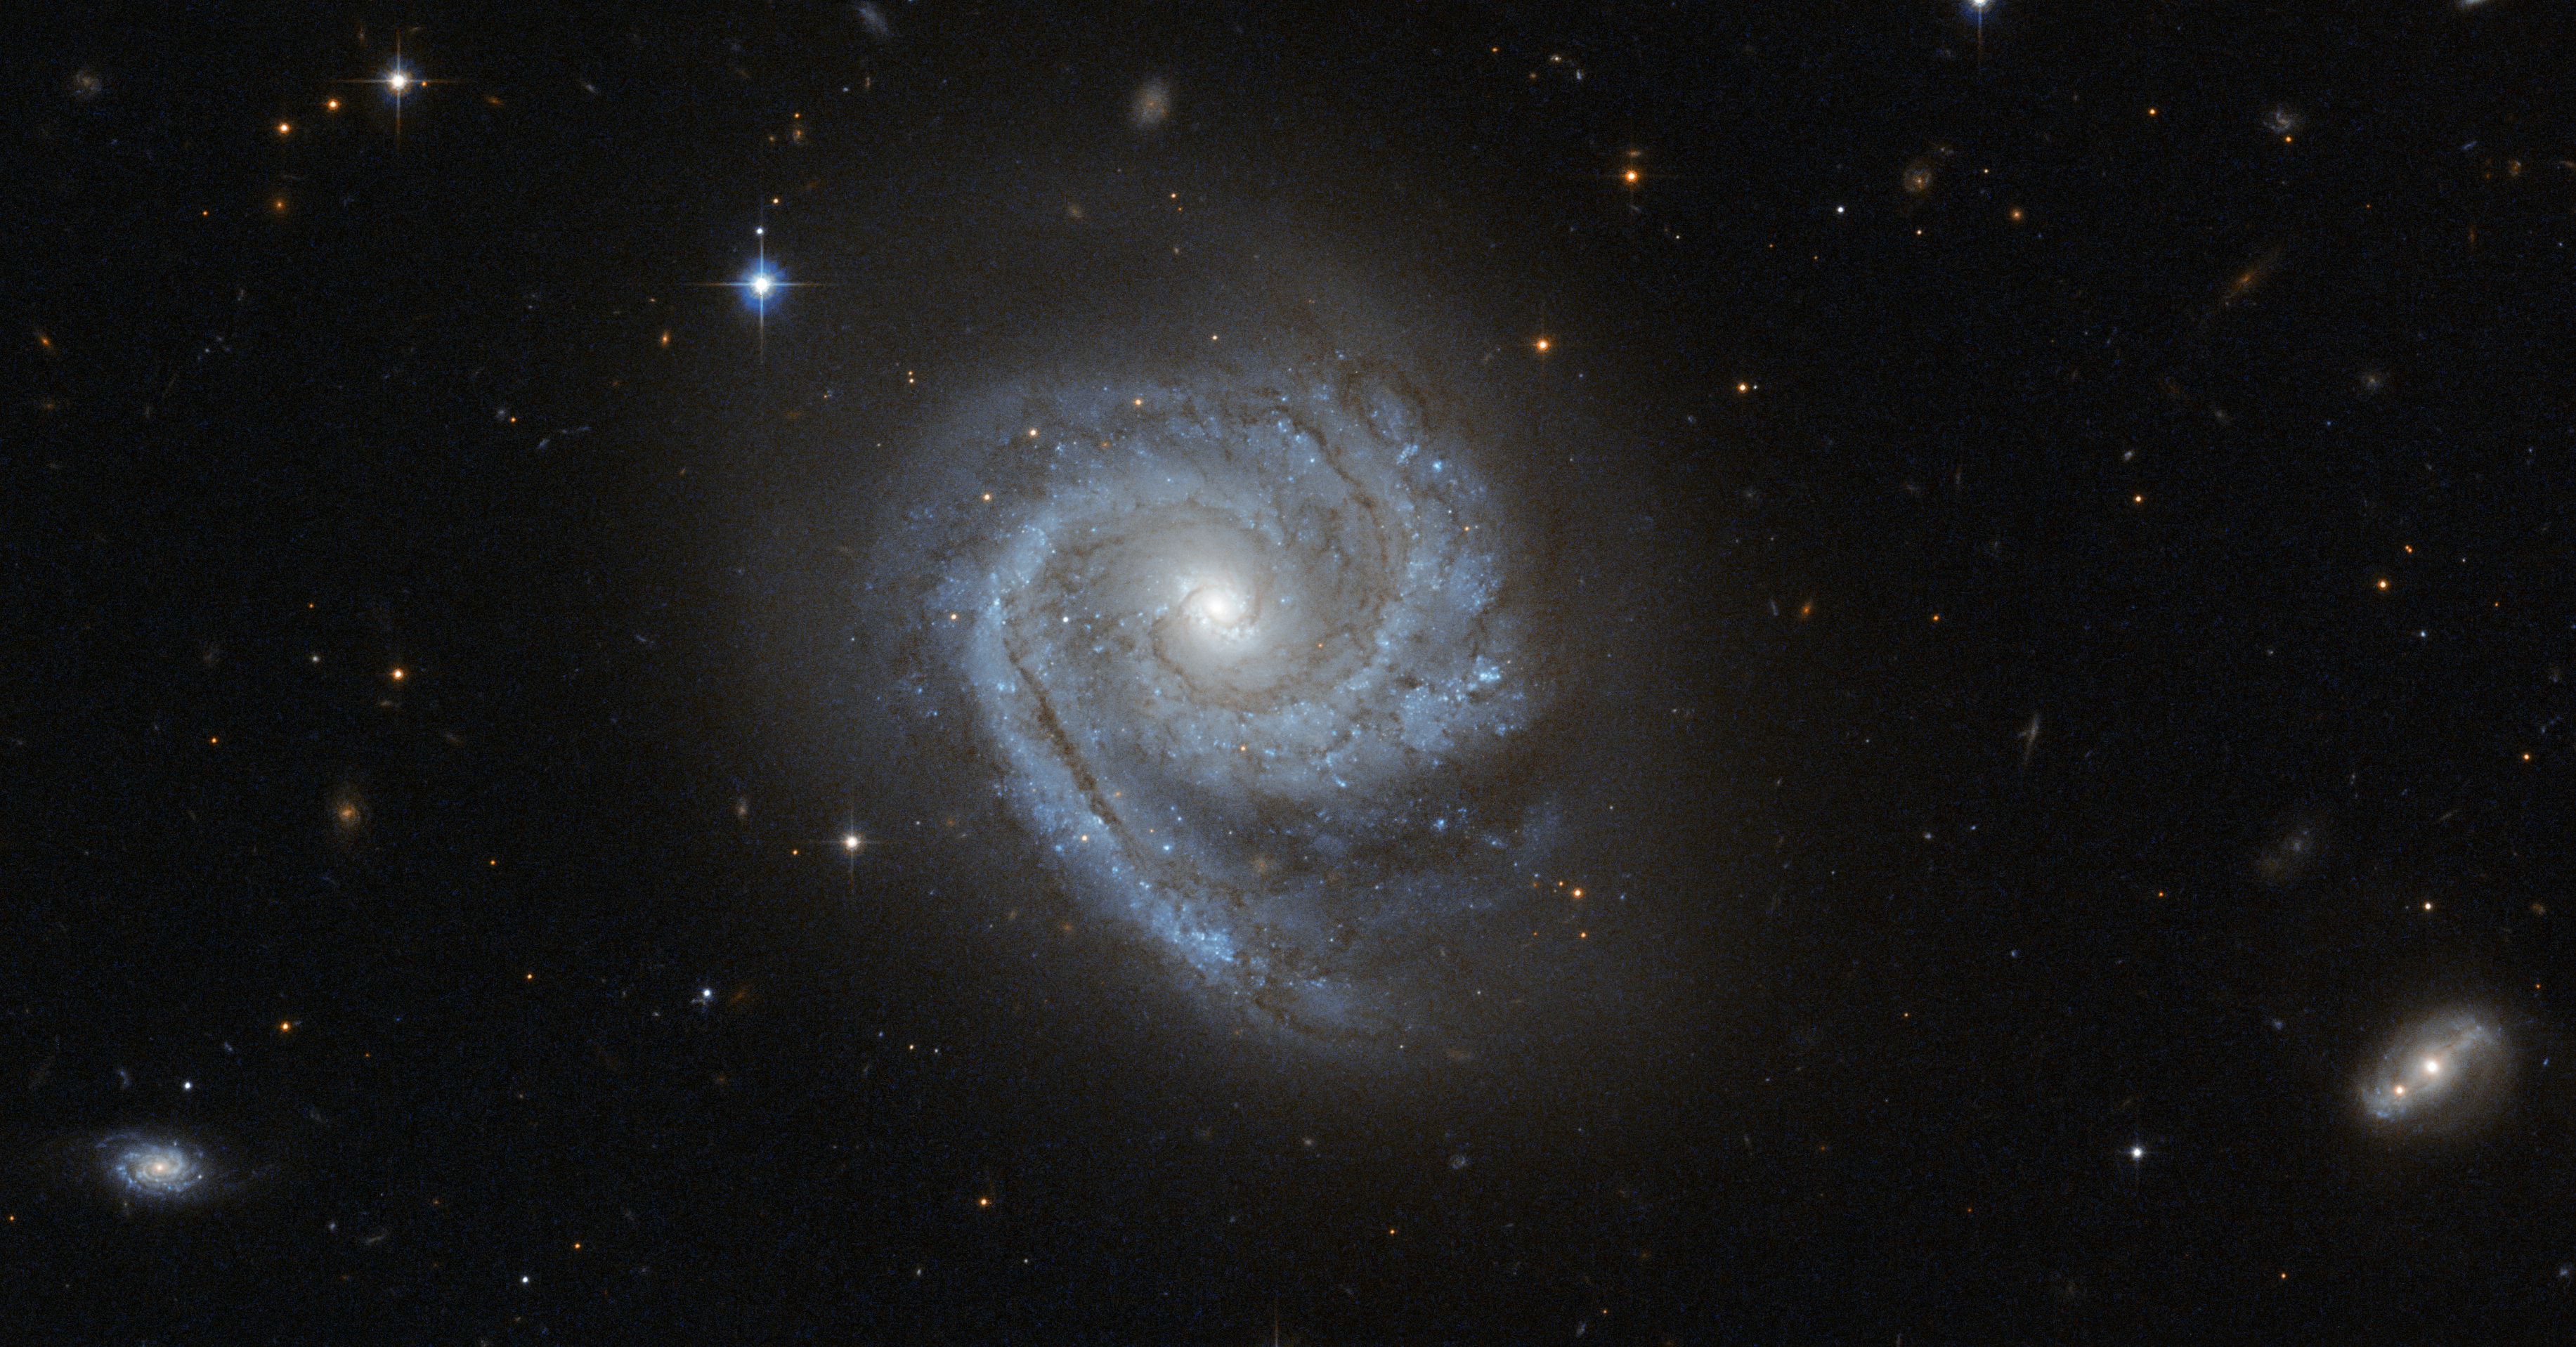

A spiral within a spiral

The NASA/ESA Hubble Space Telescope captured this image of the spiral galaxy known as ESO 498-G5. One interesting feature of this galaxy is that its spiral arms wind all the way into the centre, so that ESO 498-G5's core looks like a bit like a miniature spiral galaxy. This sort of structure is in contrast to the elliptical star-filled centres (or bulges) of many other spiral galaxies, which instead appear as glowing masses, as in the case of NGC 6384.

Astronomers refer to the distinctive spiral-like bulge of galaxies such as ESO 498-G5 as disc-type bulges, or pseudobulges, while bright elliptical centres are called classical bulges. Observations from the Hubble Space Telescope, which does not have to contend with the distorting effects of Earth's atmosphere, have helped to reveal that these two different types of galactic centres exist. These observations have also shown that star formation is still going on in disc-type bulges and has ceased in classical bulges. This means that galaxies can be a bit like Russian matryoshka dolls: classical bulges look much like a miniature version of an elliptical galaxy, embedded in the centre of a spiral, while disc-type bulges look like a second, smaller spiral galaxy located at the heart of the first — a spiral within a spiral.

The similarities between types of galaxy bulge and types of galaxy go beyond their appearance. Just like giant elliptical galaxies, the classical bulges consist of great swarms of stars moving about in random orbits. Conversely, the structure and movement of stars within disc-type bulges mirror the spiral arms arrayed in a galaxy's disc. These differences suggest different origins for the two types of bulges: while classical bulges are thought to develop through major events, such as mergers with other galaxies, disc-type bulges evolve gradually, developing their spiral pattern as stars and gas migrate to the galaxy’s centre.

ESO 498-G5 is located around 100 million light-years away in the constellation of Pyxis (The Compass). This image is made up of exposures in visible and infrared light taken by Hubble’s Advanced Camera for Surveys. The field of view is approximately 3.3 by 1.6 arcminutes.

Credit: ESA/Hubble & NASA